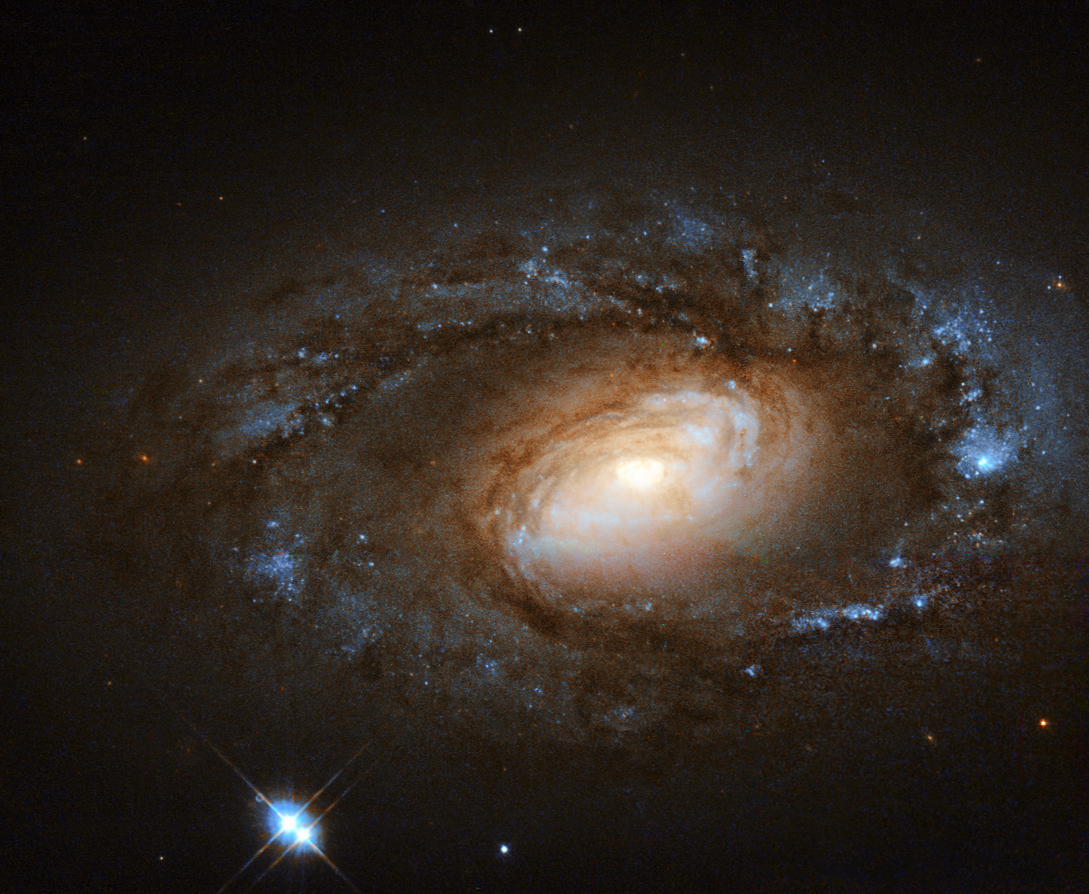

This is no supermodel spiral

The NASA/ESA Hubble Space Telescope observes some of the most beautiful galaxies in our skies — spirals sparkling with bright stellar nurseries (heic1403), violent duos ripping gas and stars away from one another as they tangle together (heic1311), and ethereal irregular galaxies that hang like flocks of birds suspended in the blackness of space (heic1114, heic1207).

However, galaxies, like humans, are not all supermodels. This little spiral, known as NGC 4102, has a different kind of appeal, with its tightly-wound spiral arms and understated, but charming, appearance.

NGC 4102 lies in the northern constellation of Ursa Major (The Great Bear). It contains what is known as a LINER, or low-ionization nuclear emission-line region, meaning that its nucleus emits particular types of radiation — specifically, emission from weakly-ionised or neutral atoms of certain elements. Even in this sense, NGC 4102 is not special; around one third of all nearby galaxies are thought to be LINER galaxies.

Many LINER galaxies also contain intense regions of star formation. This is thought to be intrinsically linked to their centres but just why is still a mystery for astronomers — either the starbursts pour fuel inwards to fuel the LINERs, or this active central region triggers the starbursts. NGC 4102 does indeed contain a starburst region towards its centre, where stars are being created at a rate much more furious than in a normal galaxy. This star formation is taking place within a small rotating disc, around 1000 light-years in diameter and with a mass some three billion times the mass of the Sun.

This image uses infrared and visible observations taken using Hubble’s Wide Field Planetary Camera 2. A version of this image was submitted to the Hubble's Hidden Treasures image processing competition by contestant Renaud Houdinet.

A team of astronomers led by Stephen Smartt of Queen's University Belfast, the Principal Investigator for the observations making up this image, have spent the last 15 years searching for the progenitor stars of supernovae in galaxy images like this. A recent review article explores some of the results from such studies.

Credit: ESA/Hubble, NASA and S. Smartt (Queen's University Belfast) Acknowledgement: Renaud Houdinet